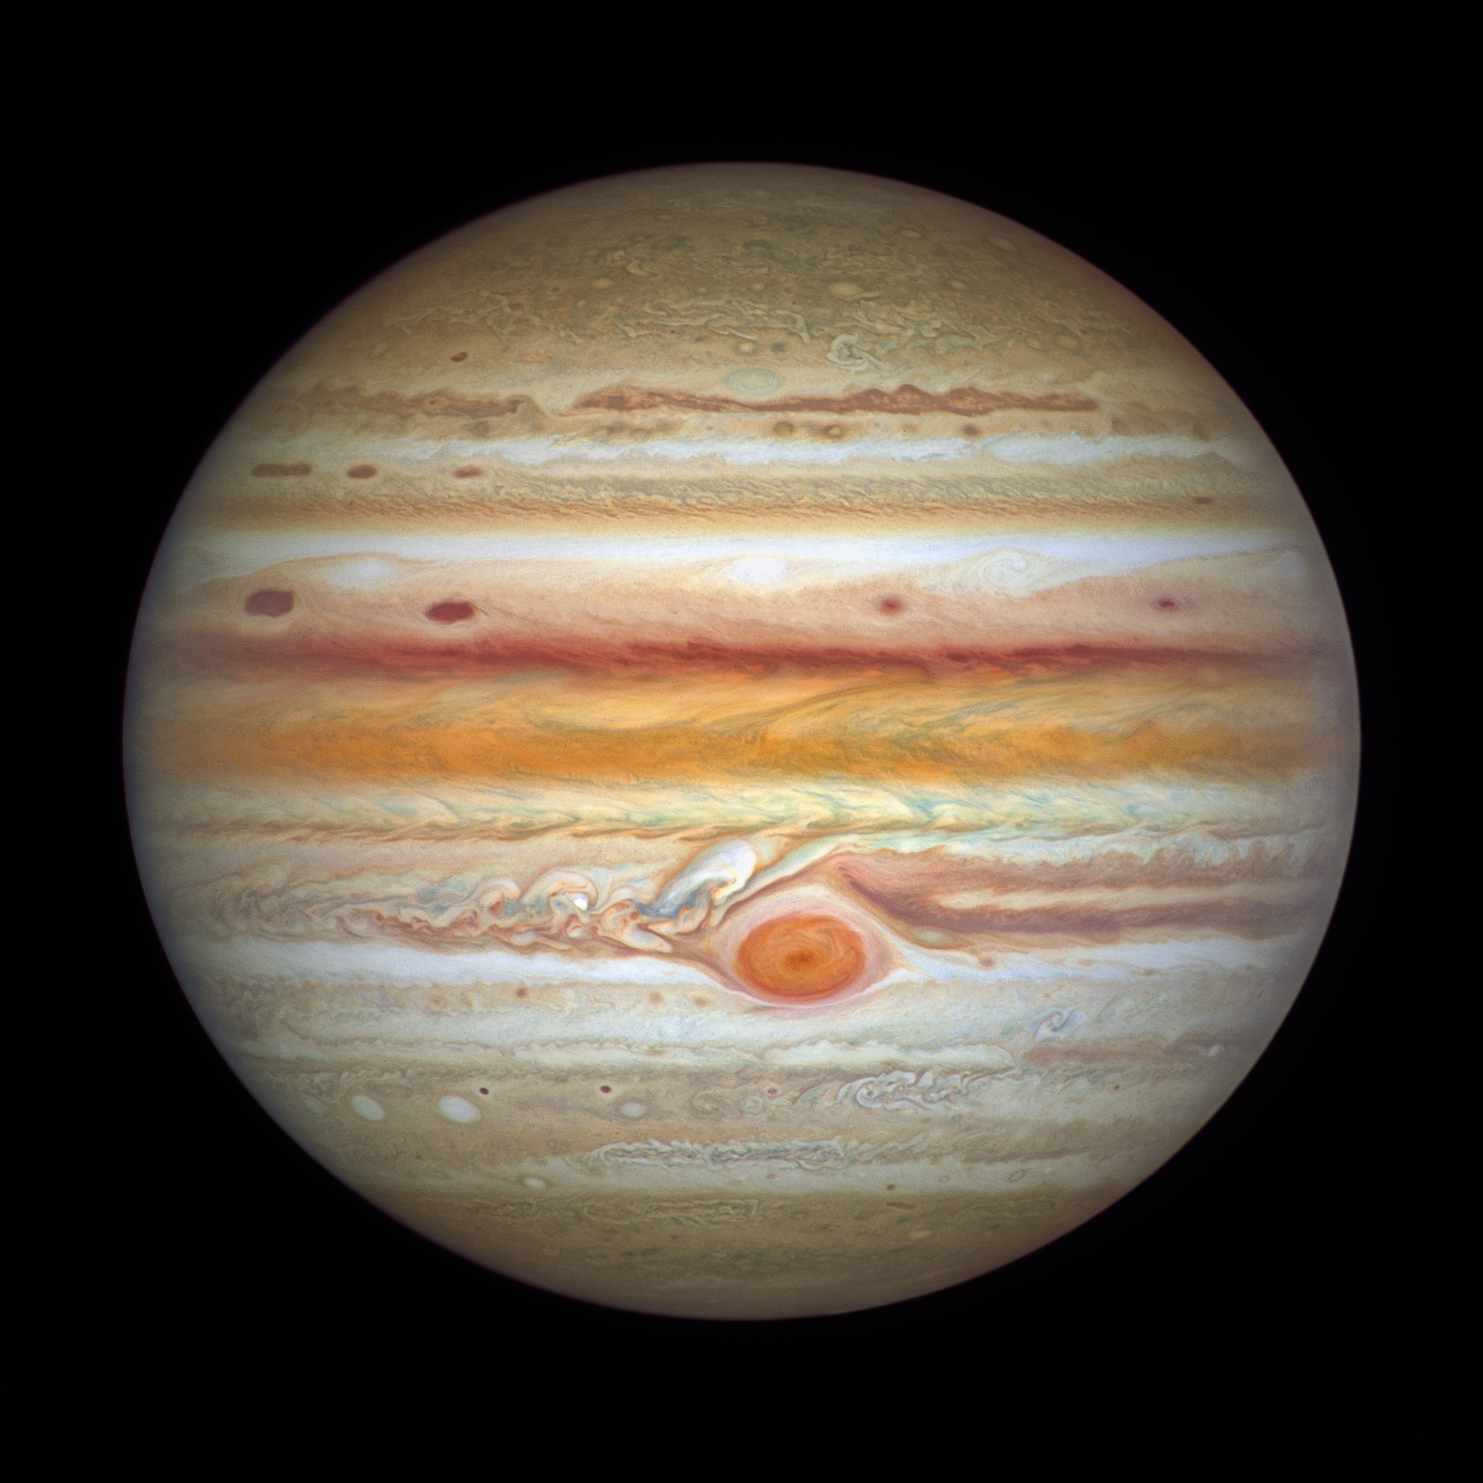

Hubble’s Observation of Jupiter in 2021

Hubble’s 2021 image of Jupiter tracks the ever-changing landscape of its turbulent atmosphere, where several new storms are making their mark and the planet’s equator has changed colour yet again.

Hubble’s 4 September photo puts the giant planet’s tumultuous atmosphere on full display. The planet’s equatorial zone is now a deep orange hue, which researchers are calling unusual. While the equator has departed from its traditional white or beige appearance for a few years now, scientists were surprised to find a deeper orange in Hubble’s recent imaging, where they were expecting the zone to cloud up again.

Just above the equator, researchers note the appearance of several new storms, nicknamed “barges.” These elongated, deeply structured red cells can be defined as cyclonic vortices, which vary in appearance. While some of the storms are sharply defined and clear, others are fuzzy and hazy. This difference in appearance is caused by the physical properties within the clouds of the vortices.

Researchers note that a feature dubbed “Red Spot Jr.” (Oval BA), below the Great Red Spot where Hubble just discovered winds are speeding up, is still a darker beige colour, and is joined by several additional white, cyclonic storms to the south.

Credit: NASA, ESA, A. Simon (Goddard Space Flight Center), and M.H. Wong (University of California, Berkeley) and the OPAL team